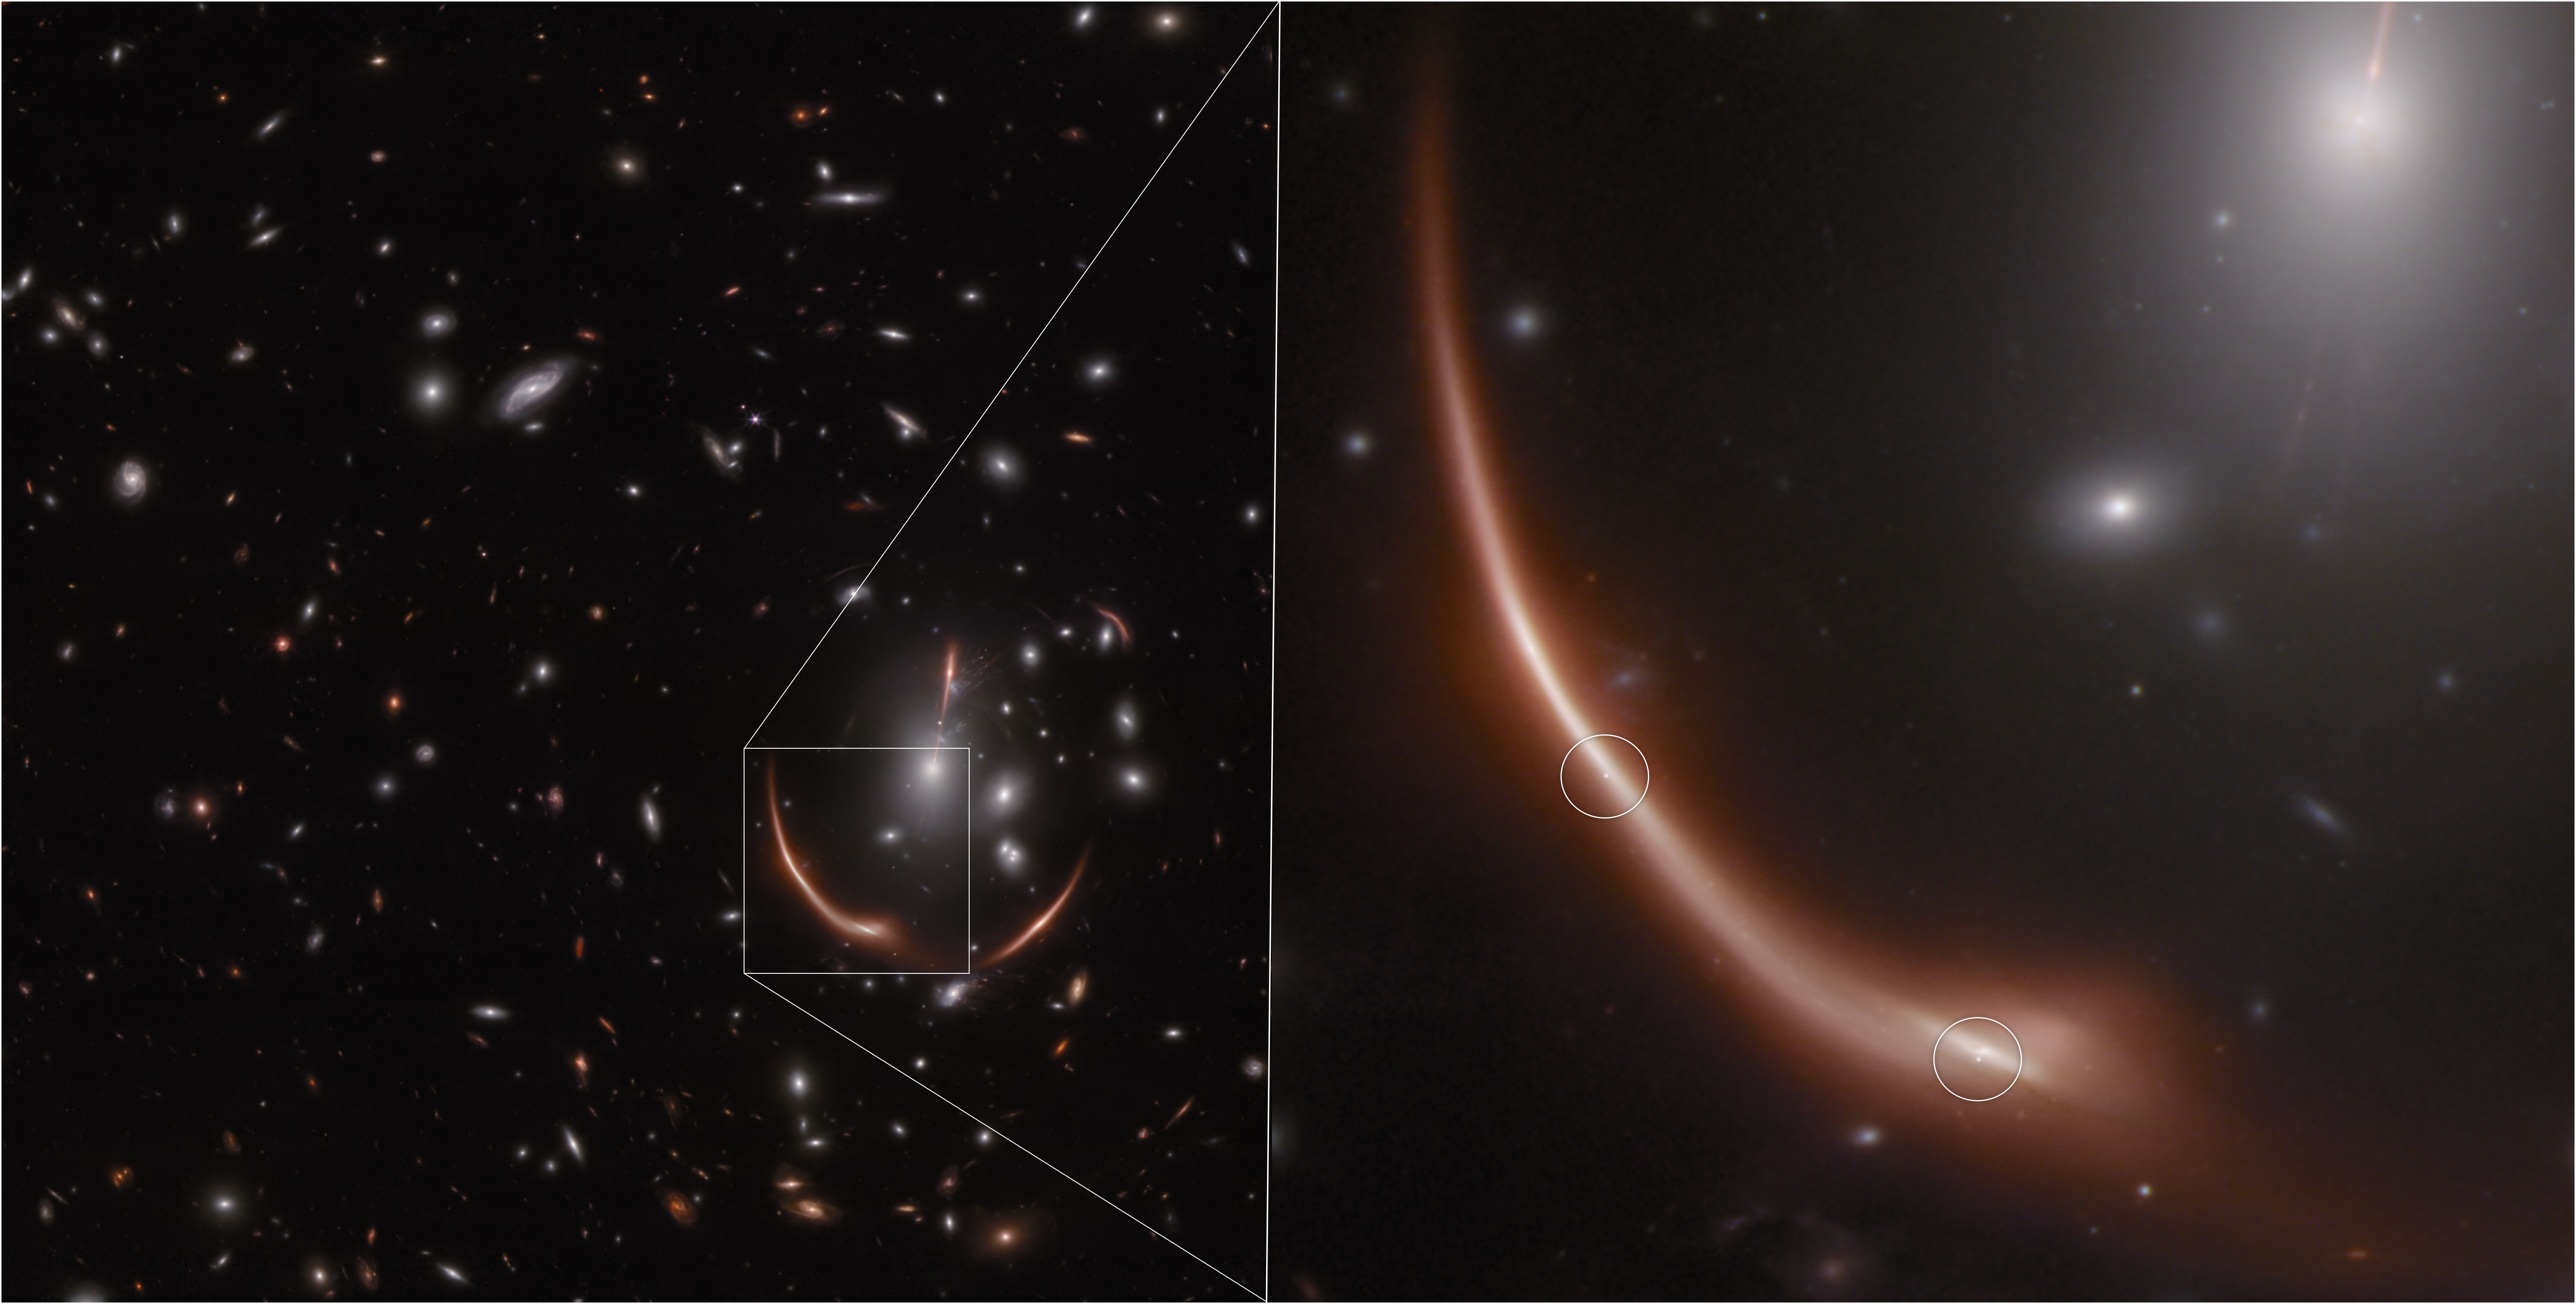

Webb spots a second lensed supernova in a distant galaxy

In November 2023, the NASA/ESA/CSA James Webb Space Telescope observed a massive cluster of galaxies named MACS J0138.0-2155. Through an effect called gravitational lensing, first predicted by Albert Einstein, a distant galaxy named MRG-M0138 appears warped by the powerful gravity of the intervening galaxy cluster. In addition to warping and magnifying the distant galaxy, the gravitational lensing effect caused by MACS J0138 produces five different images of MRG-M0138.

In 2019, astronomers announced the surprising find that a stellar explosion, or supernova, had occurred within MRG-M0138, as seen in images from the NASA/ESA Hubble Space Telescope taken in 2016. When another group of astronomers examined the 2023 Webb images, they were astonished to find that seven years later, the same galaxy is home to a second supernova.

Two images of the supernova (circled) are seen in the Webb NIRCam (Near-Infrared Camera) image above, but an additional supernova image is expected to become visible around 2035.

In this image blue represents light at 1.15 and 1.5 microns (F115W+F150), green is 2.0 and 2.77 microns (F200W+277W), and red is 3.56 and 4.44 microns (F356W + F444W).

These observations were taken as part of Webb Director’s Discretionary Time program 6549.

Note: This post highlights data from Webb science in progress, which has not yet been through the peer-review process.

Credit: NASA, ESA, CSA, J. Pierel (STScI), D. Newman (Carnegie), A. Pagan (STScI)